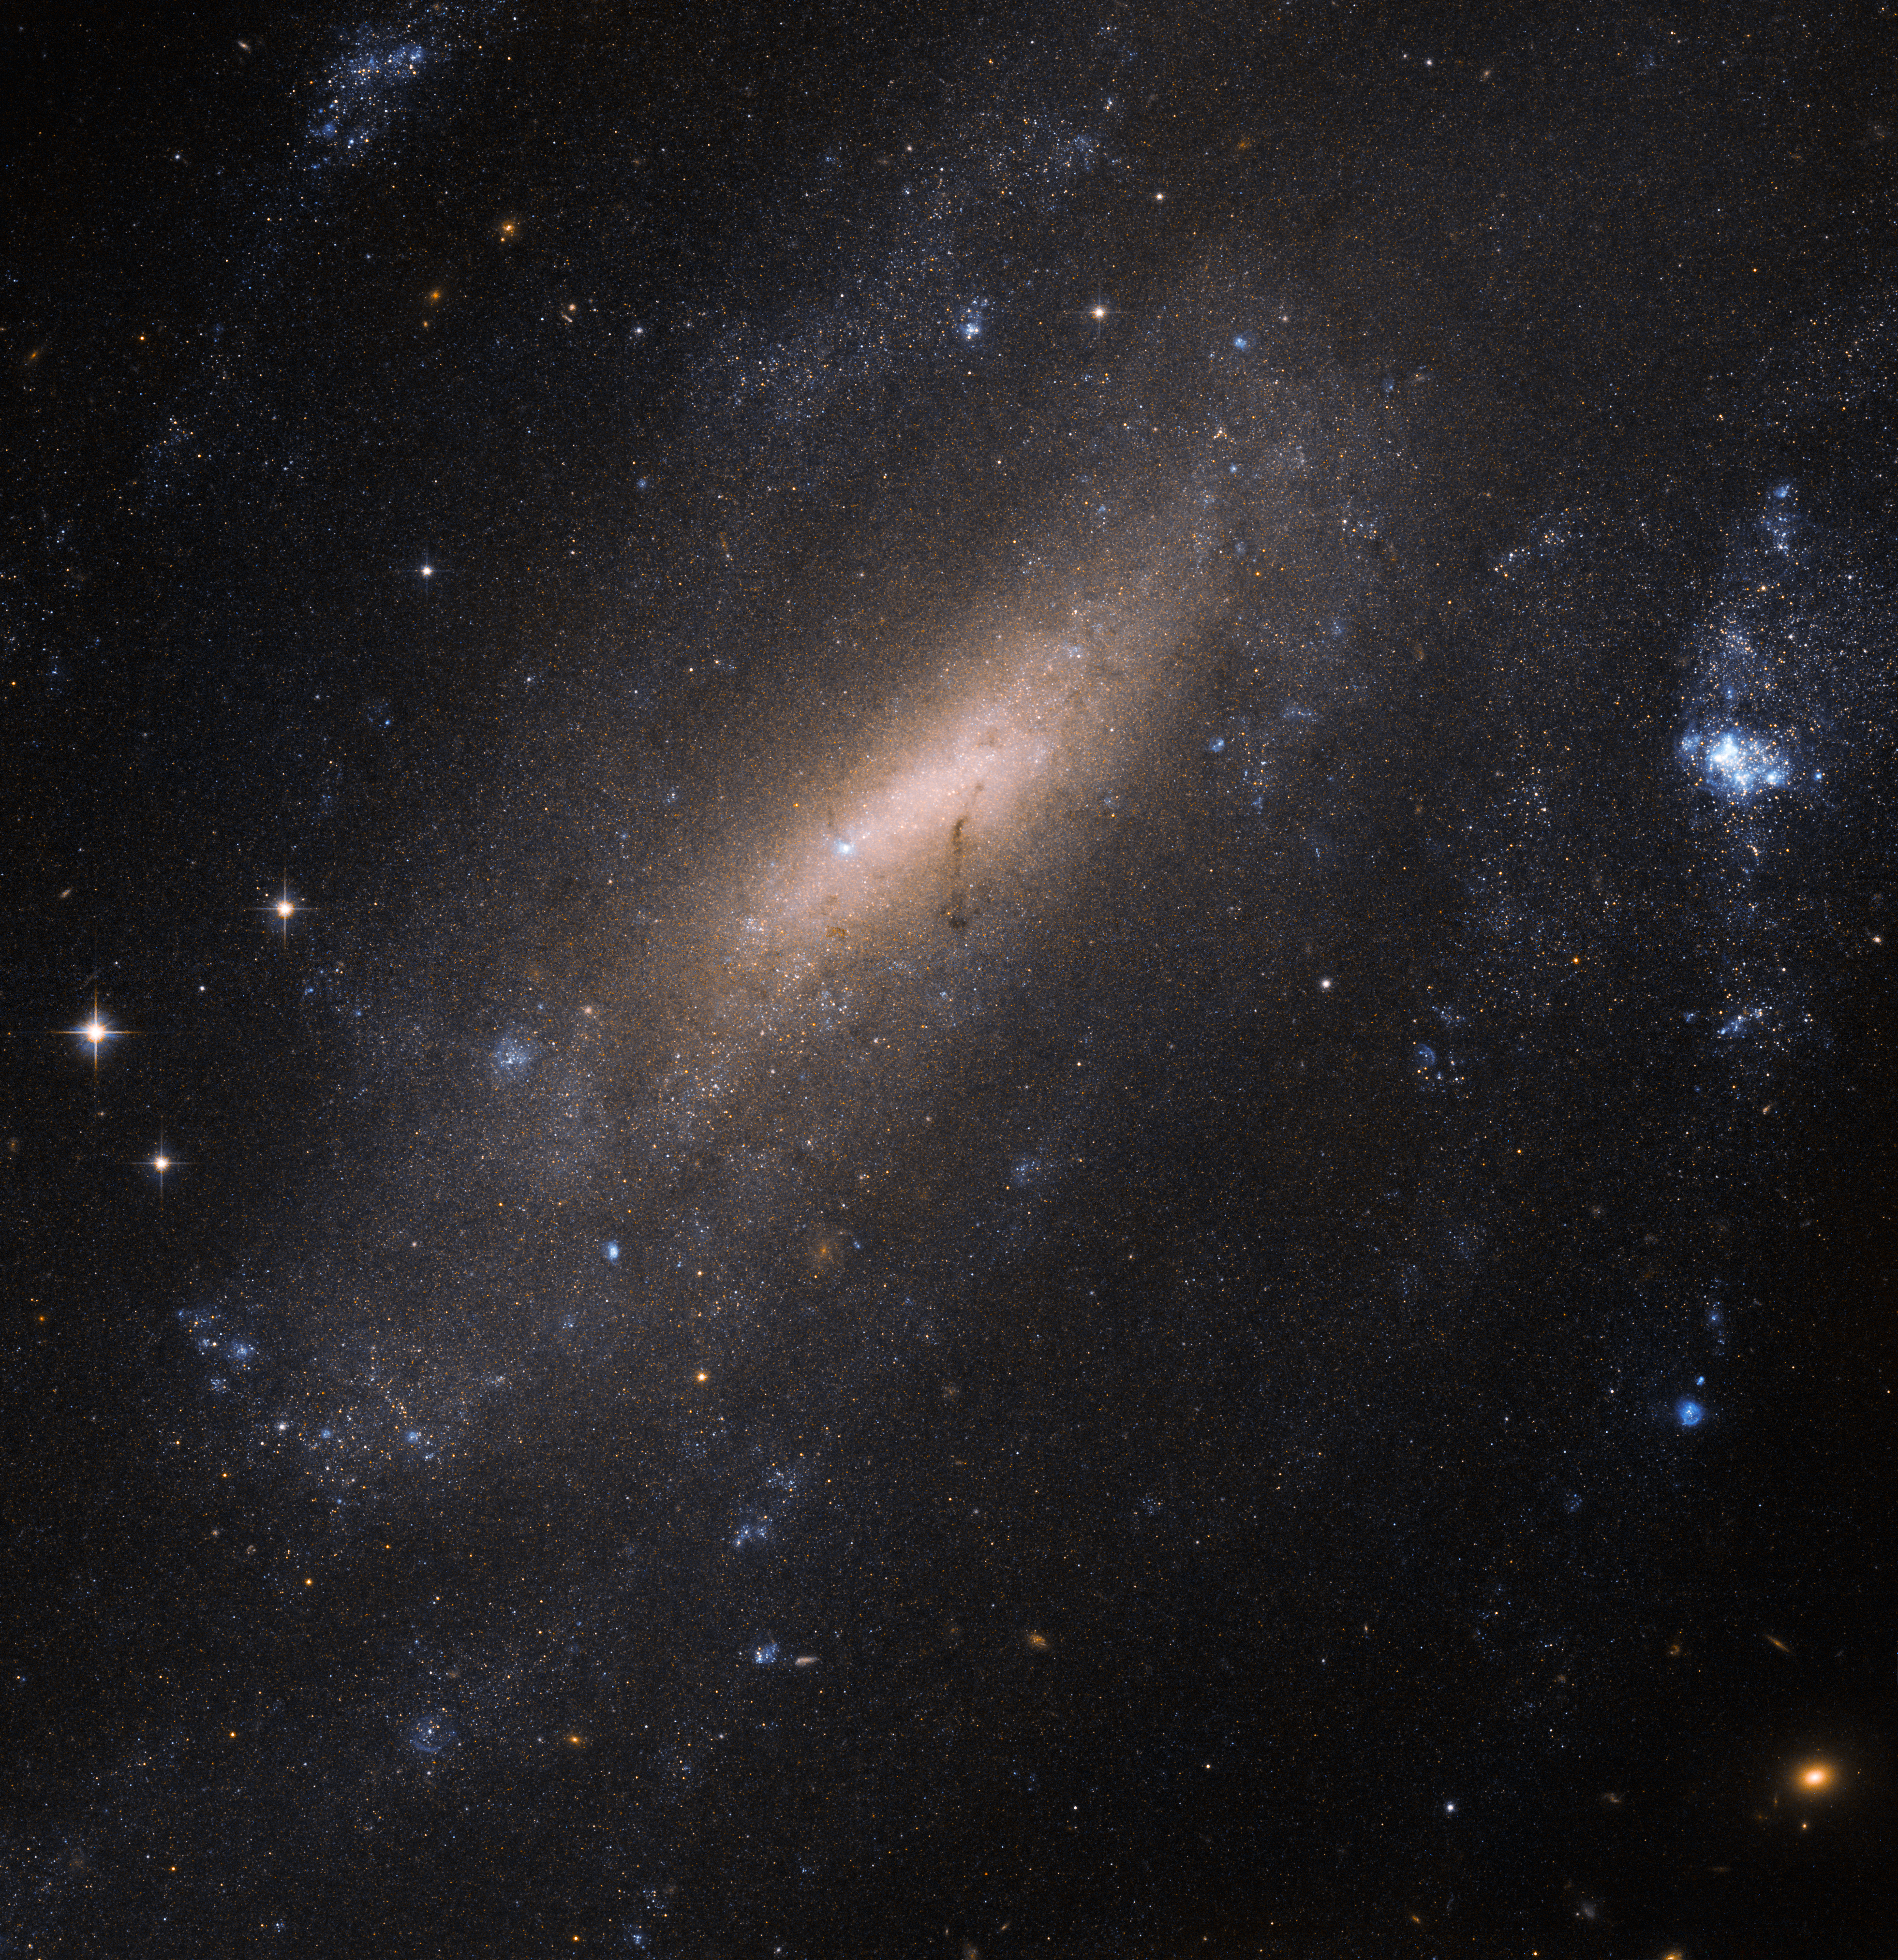

A closer look at IC 5201

In 1900, astronomer Joseph Lunt made a discovery: Peering through a telescope at Cape Town Observatory, the British–South African scientist spotted this beautiful sight in the southern constellation of Grus (The Crane): a barred spiral galaxy now named IC 5201.

Over a century later, the galaxy is still of interest to astronomers. For this image, the NASA/ESA Hubble Space Telescope used its Advanced Camera for Surveys (ACS) to produce a beautiful and intricate image of the galaxy. Hubble’s ACS can resolve individual stars within other galaxies, making it an invaluable tool to explore how various populations of stars have sprung to life, evolved, and died throughout the cosmos.

IC 5201 sits over 40 million light-years away from us. As with two thirds of all the spirals we see in the Universe — including the Milky Way, the galaxy has a bar of stars slicing through its centre.

Credit: ESA/Hubble & NASA